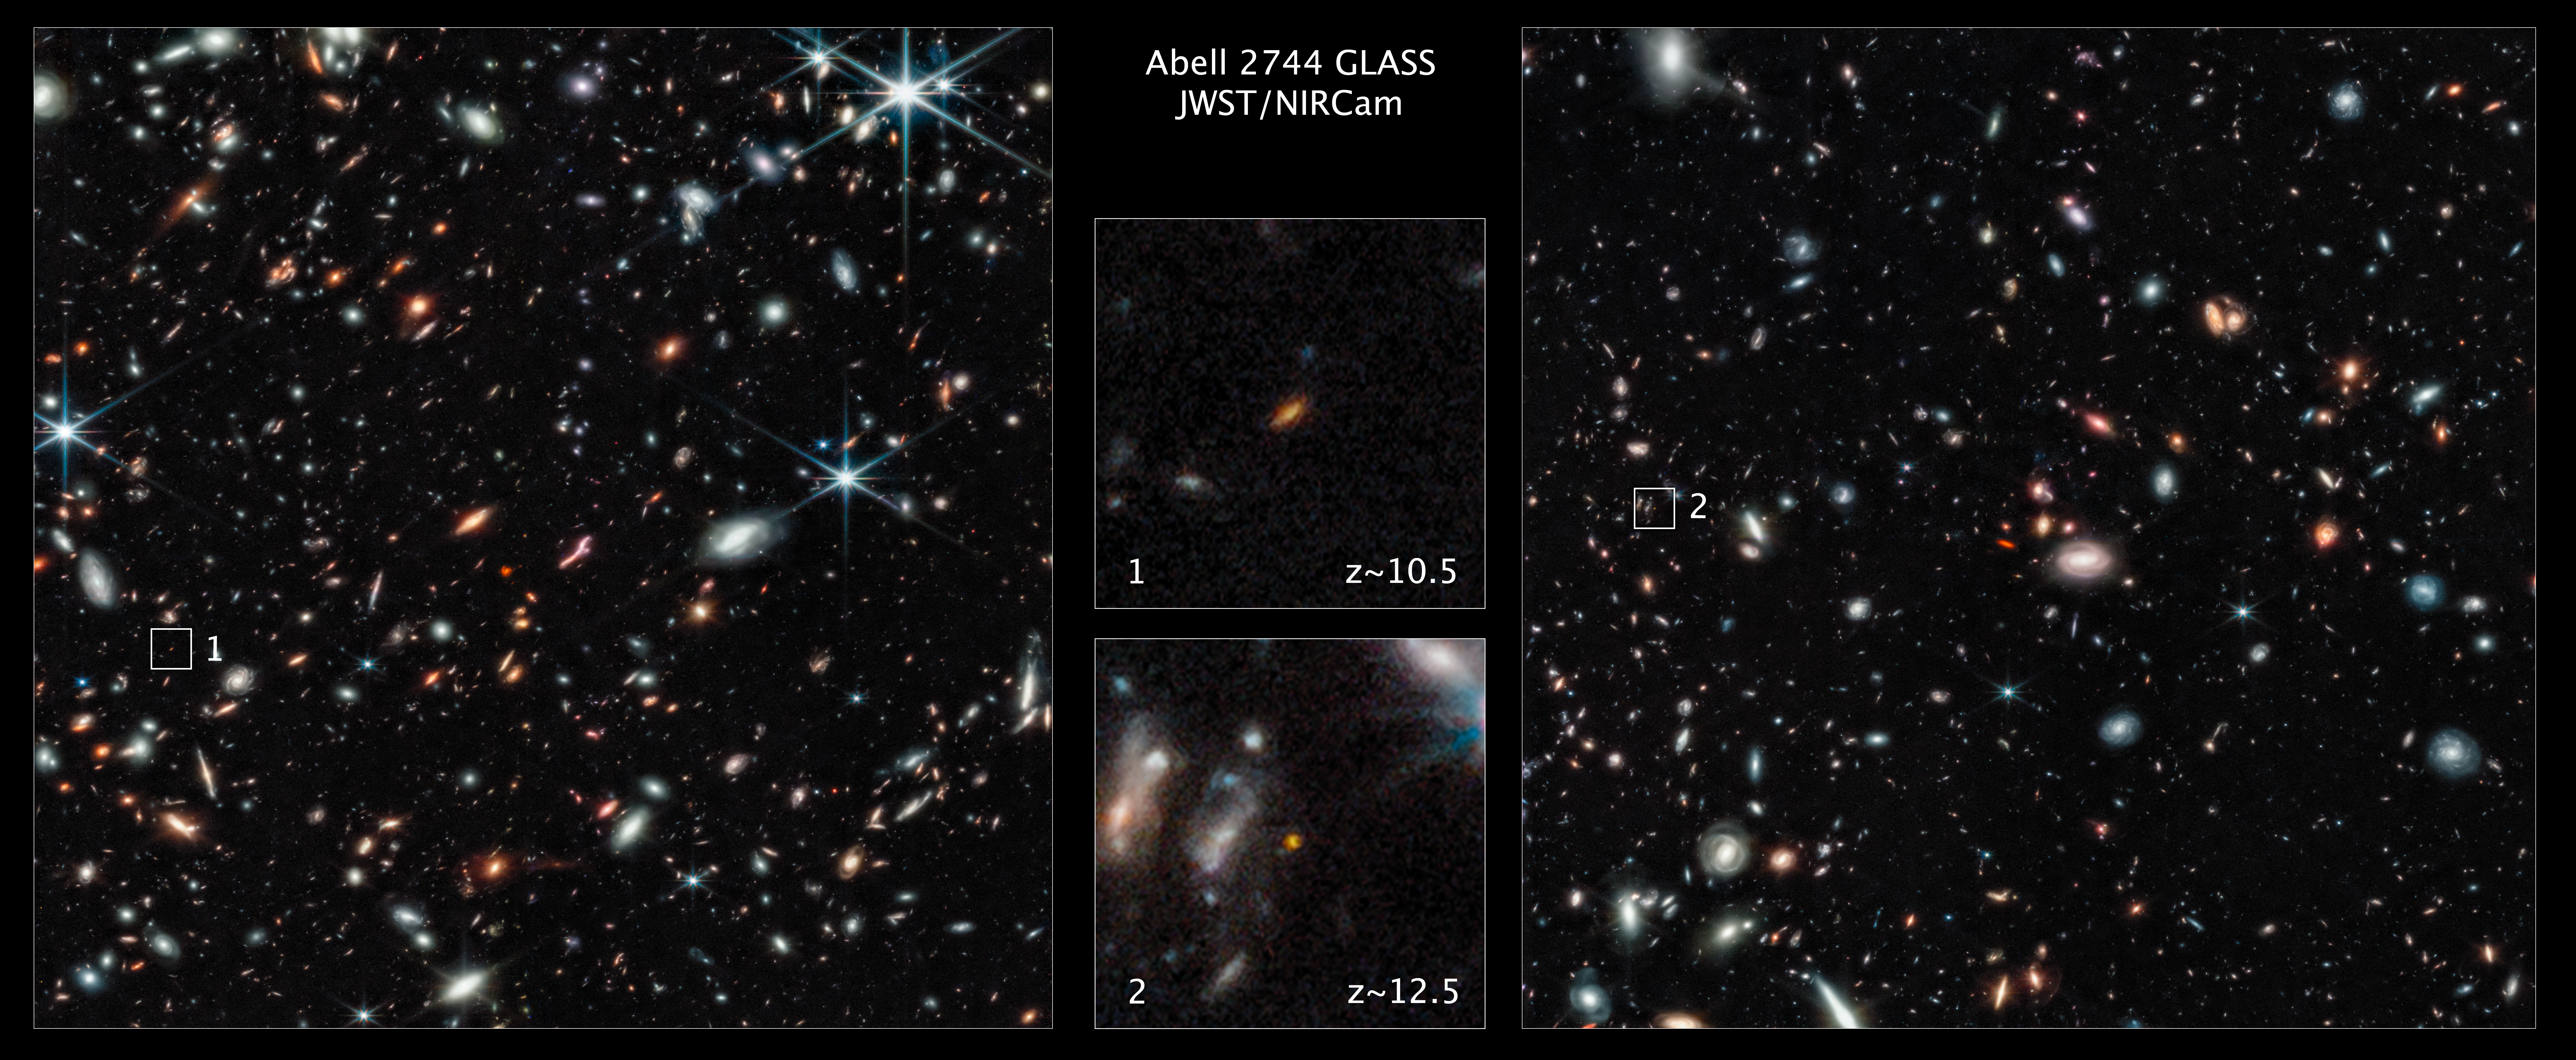

Webb Finds Distant Galaxies Seen Behind Pandora’s Cluster

Two of the most distant galaxies seen to date are captured in these Webb pictures of the outer regions of the giant galaxy cluster Abell 2744. The galaxies are not inside the cluster, but many billions of light-years behind it.

The galaxy featured in the image at the top centre is extracted from the image on the left. It existed only 450 million years after the Big Bang.

The galaxy featured in the image at the bottom centre is extracted from the image on the right. It existed 350 million years after the Big Bang.

Both galaxies are seen really close in time to the Big Bang which occurred 13.8 billion years ago. These galaxies are tiny compared to our Milky Way, being just a few percent of its size, even the unexpectedly elongated galaxy showcased in the top centre image.

Credit: NASA, ESA, CSA, T. Treu (UCLA)